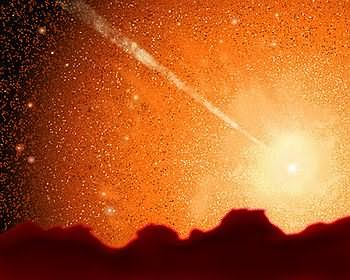

Milky Way/Andromeda collision (artist's impression)

The Hubble telescope has uncovered over 1,000 bright; young star clusters bursting to life in a brief, intense, brilliant "fireworks show" at the heart of a pair of colliding galaxies. This artist's impression shows what it may look like when the Milky Way and Andromeda collide.

Credit: James Gitlin